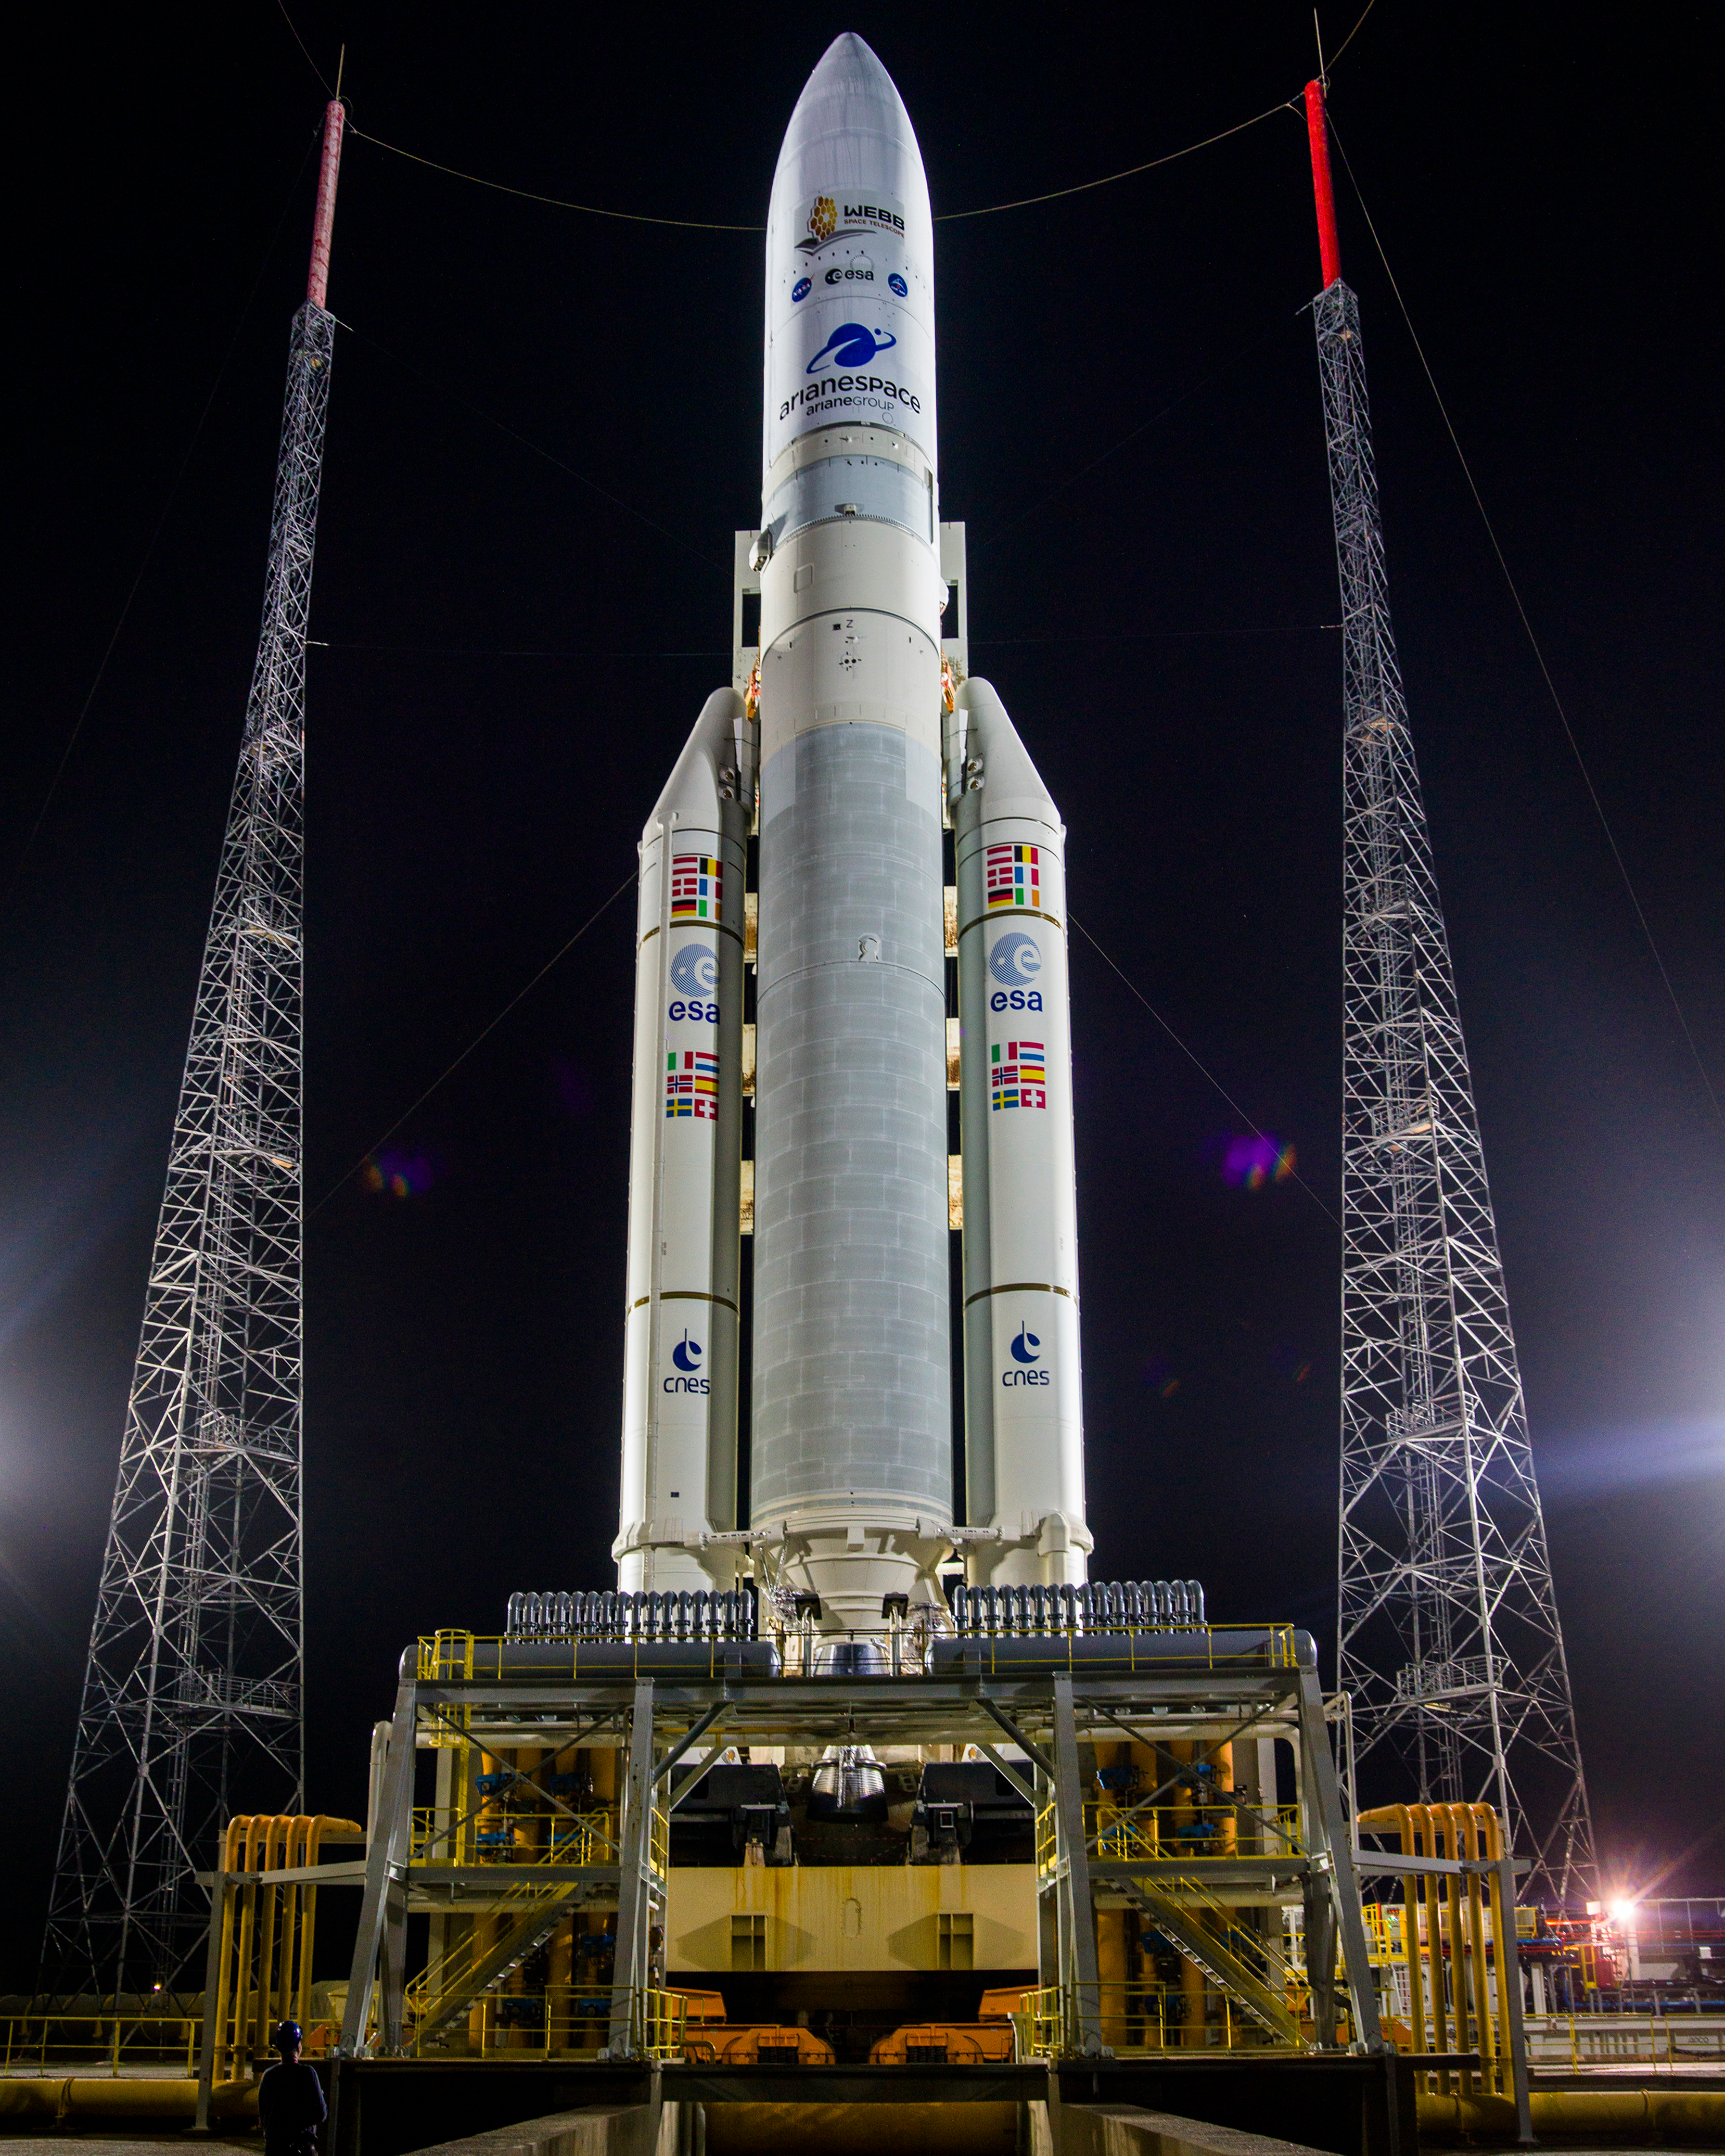

Ariane 5 with James Webb Space Telescope Prelaunch

Arianespace's Ariane 5 rocket with NASA’s James Webb Space Telescope onboard, is seen at the launch pad, Thursday, Dec. 23, 2021, at Europe’s Spaceport, the Guiana Space Center in Kourou, French Guiana. The James Webb Space Telescope (sometimes called JWST or Webb) is a large infrared telescope with a 21.3 foot (6.5 meter) primary mirror. The observatory will study every phase of cosmic history—from within our solar system to the most distant observable galaxies in the early universe.

Credit: NASA/Chris Gunn